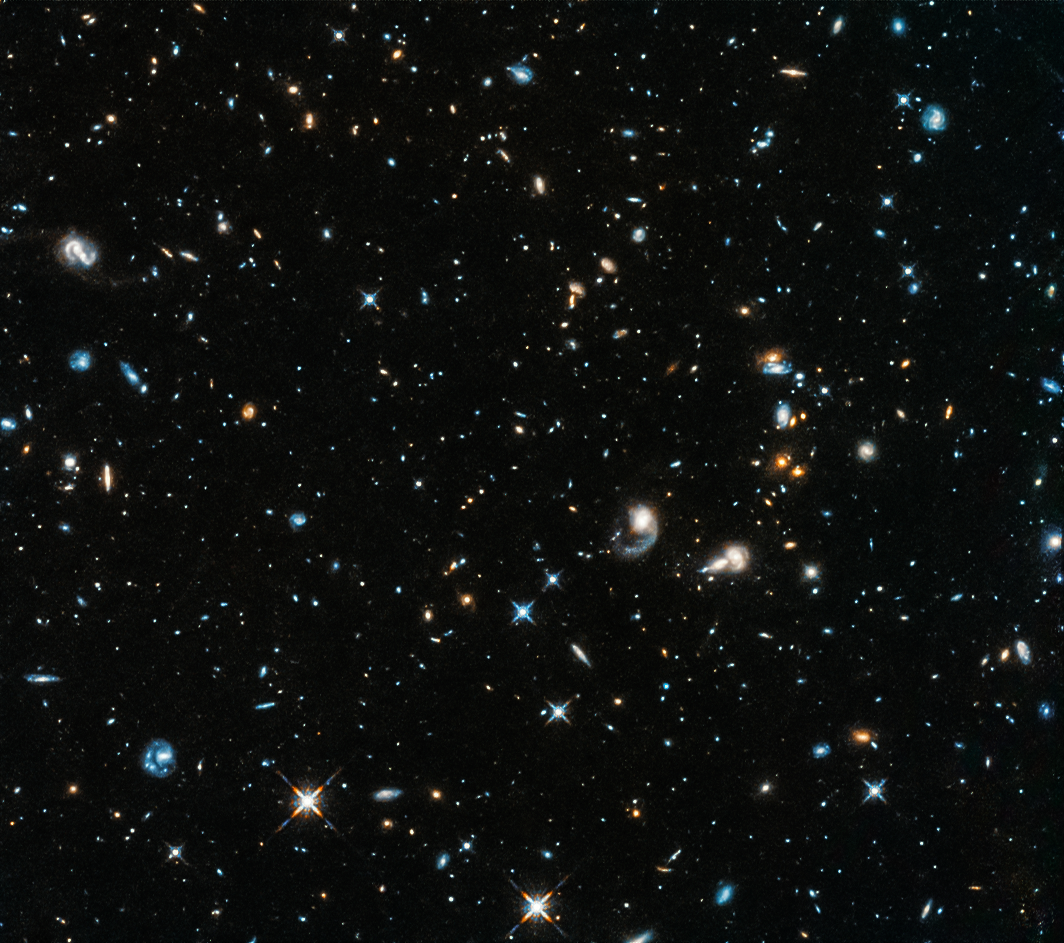

Hubble opens its eye again

For three weeks in October, Hubble’s eyes on the Universe closed. On the evening of Friday 5 October, the orbiting observatory put itself into safe mode after one of its gyroscopes failed. The telescope stopped making science observations, oriented its solar panels toward the Sun, and waited for further instructions from the ground. Within hours the ground control team had activated a backup gyroscope. However, when that gyroscope did not work correctly, the long, hard work to get the telescope exploring the Universe once again began in earnest.

The Hubble team had either to figure out how to get this backup gyroscope working, or to turn to a previously developed and tested one-gyroscope mode, which is proven to work. It took weeks of creative thinking, repeated tests, and minor setbacks to solve the problem of the misbehaving gyroscope.

Members of the Hubble operations team and of the review board suspected there might be some sort of obstruction in the gyroscope affecting its readings. Attempting to dislodge such a blockage, the team repeatedly tried switching the gyroscope between different operational modes and rotating the spacecraft by large amounts. In response, the extremely high rotation rates from the gyroscope gradually fell until they were close to normal. Encouraged but cautious, the team uploaded new software safeguards to Hubble to protect the telescope in case the gyroscope should again report unduly high rates, and then sent the telescope through some practice manoeuvres to simulate real science observations. They kept a close watch to make sure everything on the spacecraft performed correctly. It did.

In the early morning of 27 October Hubble captured its first image since slipping into safe mode at the beginning of the month. The observations targeted star-forming galaxies 11 billion light-years away in the constellation Pegasus. Astronomers hope to use observations like this to answer the question of how the Universe was reionised between 150 million and one billion years after the Big Bang.

Credit: NASA, ESA, and A. Shapley (UCLA)